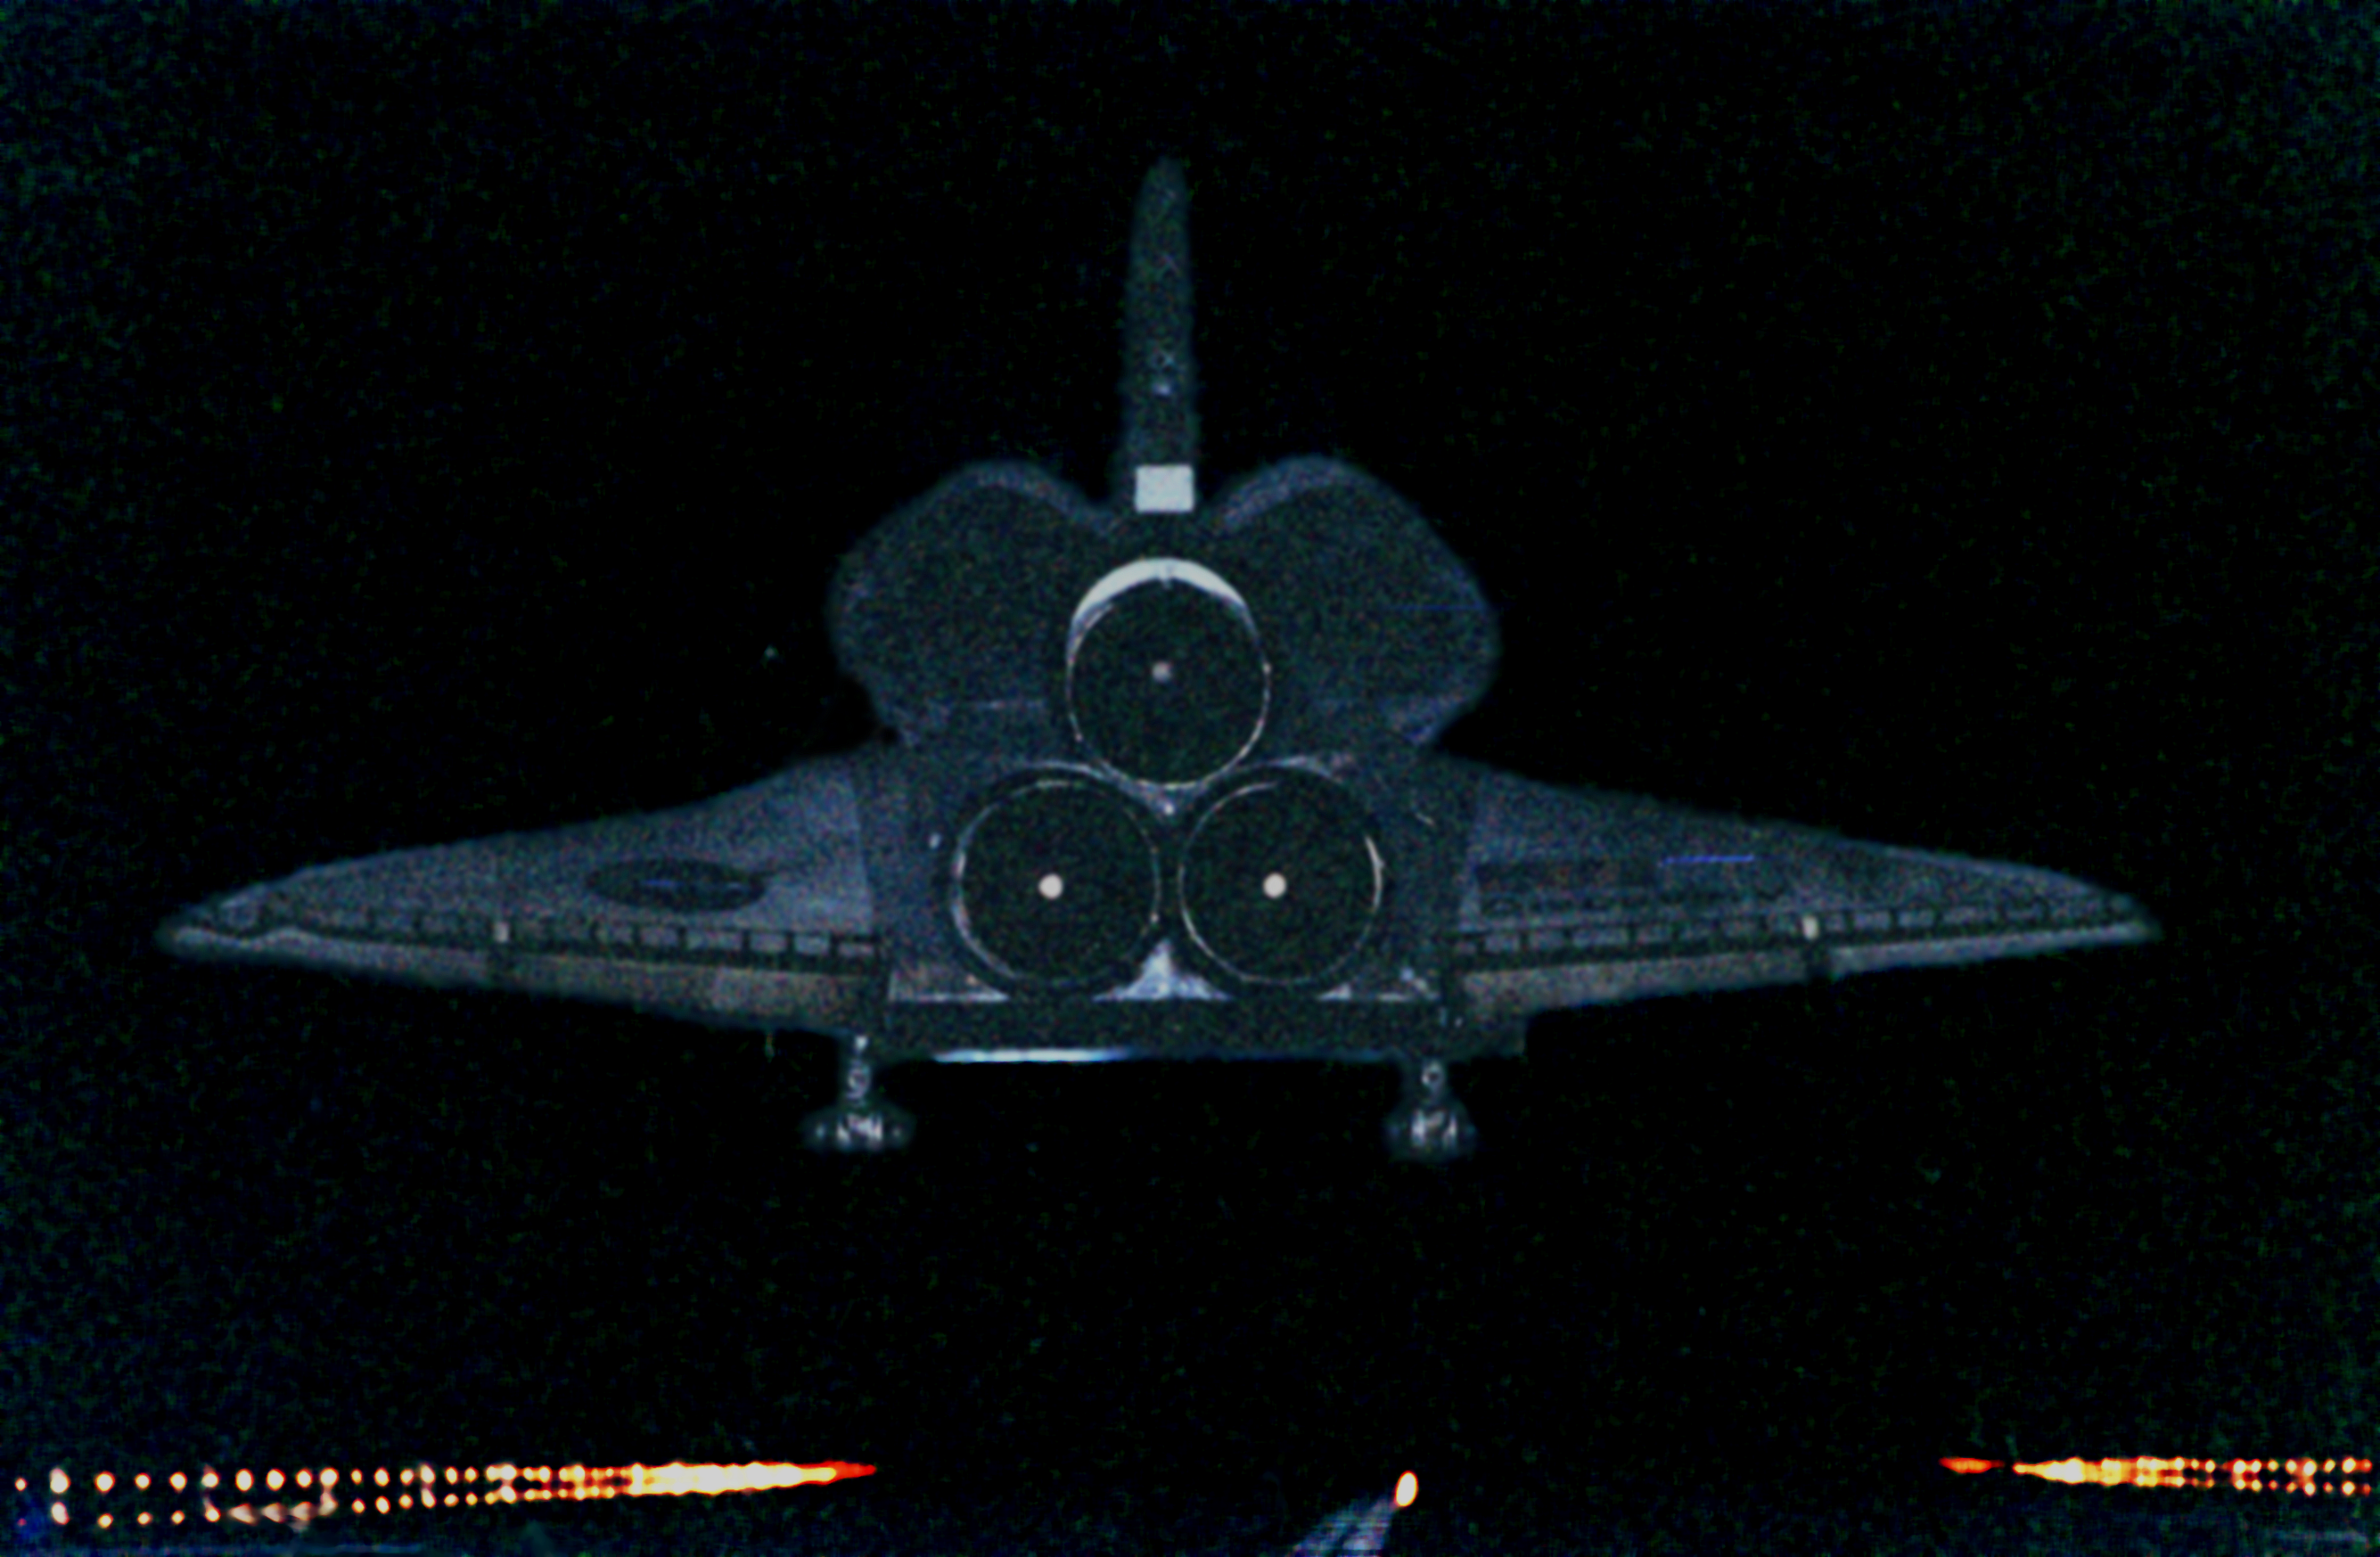

SM3A: Discovery Touchdown at Kennedy Space Center

The orbiter Discovery looks like a blue ghost as it drops from the darkness onto lighted runway 33 at KSC's Shuttle Landing Facility. After traveling more than 3, 267,000 miles (about 430 thousand kilometres) on a successful eight-day mission to service the Hubble Space Telescope, the orbiter touches down at 7:00:47 p.m. EST.

Aboard are Commander Curtis L. Brown Jr., Pilot Scott J. Kelly, and Mission Specialists Steven L. Smith, C. Michael Foale (Ph.D.), John M. Grunsfeld (Ph.D.), Claude Nicollier of Switzerland and Jean-Frangois Clervoy of France, who spent the Christmas holiday in space in order to accomplish their mission before the end of 1999.

Credit: NASA/ESA